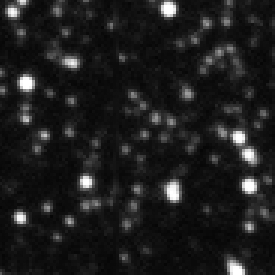

Ground-based MACHO-LMC-5 1994

Ths ground based observation image shows MACHO-LMC-5, a red dwarf star in our Milky Way galaxy. The star was observed because of a backgroundstar, STAR-0516-7029, in its close neighborhood. This giant blue star is located in the Large Magellanic Cloud, a companion dwarf galaxy of the Milky Way.

From 1993-1994 the red dwarf moved in front of the bright backgroundstar and created this way a microlensing effect; the light of the blue background star was brightened. Because of this effect Hubble was able to determine the mass of a single star (MACHO-LMC-5), which was never possible before.

Credit: NASA, ESA and D. Bennett (University of Notre Dame)